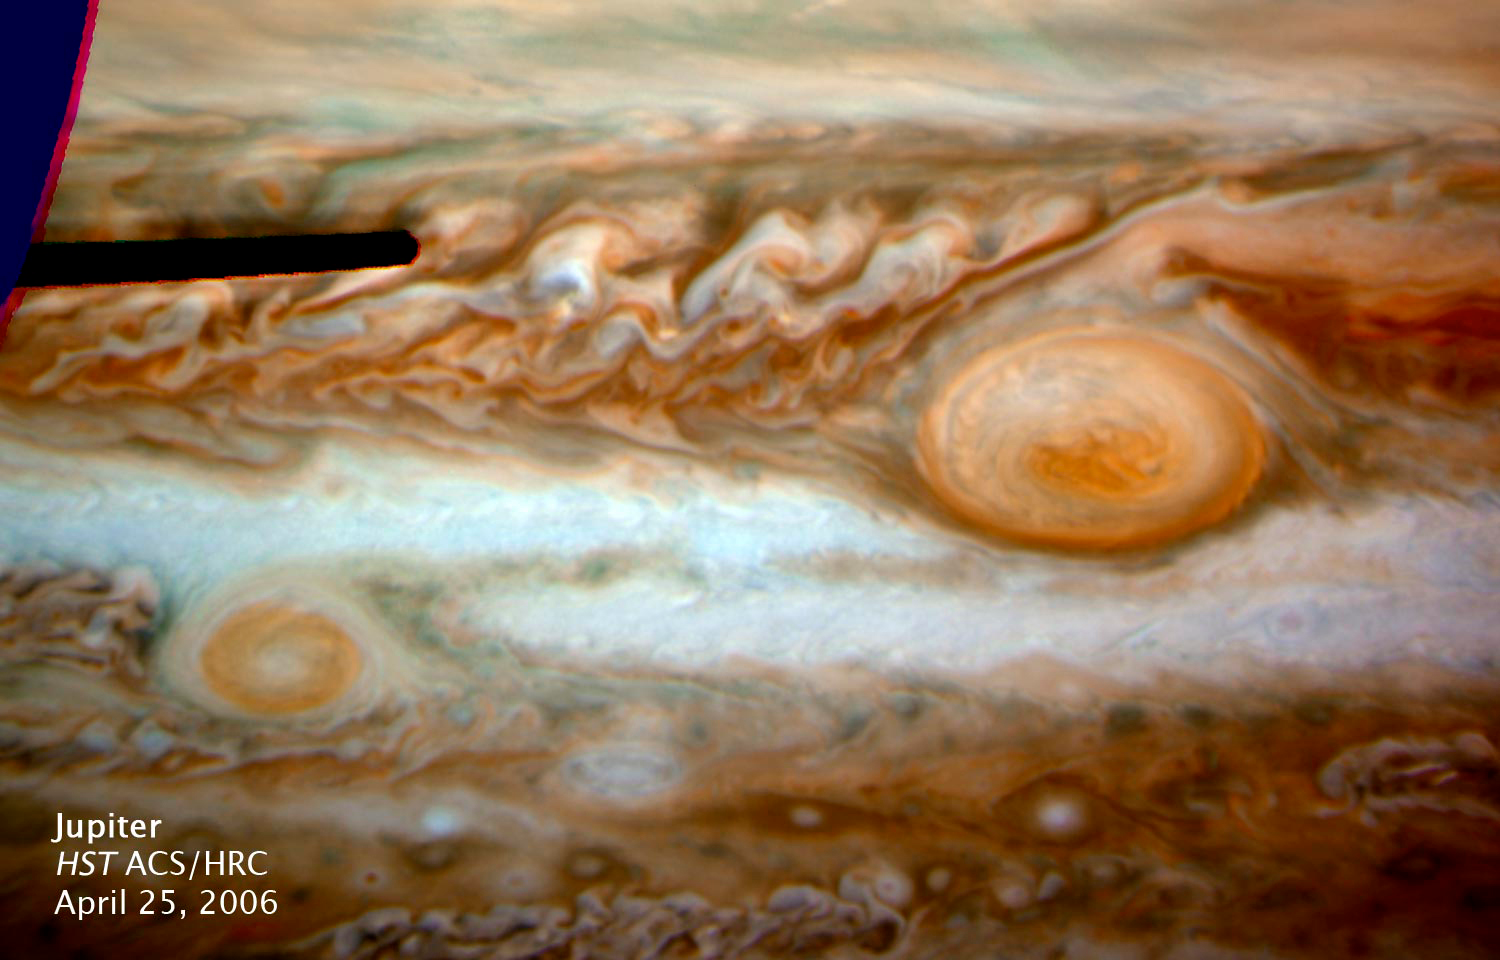

Jupiter's New Red Spot - HST ACS/HRC: April 25, 2006

Deprojected map image of the Red Spot region of Jupiter from ACS/HRC at 00:41 UT on April 25, 2006. Each pixel spans 0›.05 in latitude and longitude, with the top of the image lying just along the equator. Three filters are shown here in red (F658N), green (F502N), and blue (F435W).

Credit: NASA, ESA, I. de Pater, and M. Wong (UC Berkeley)